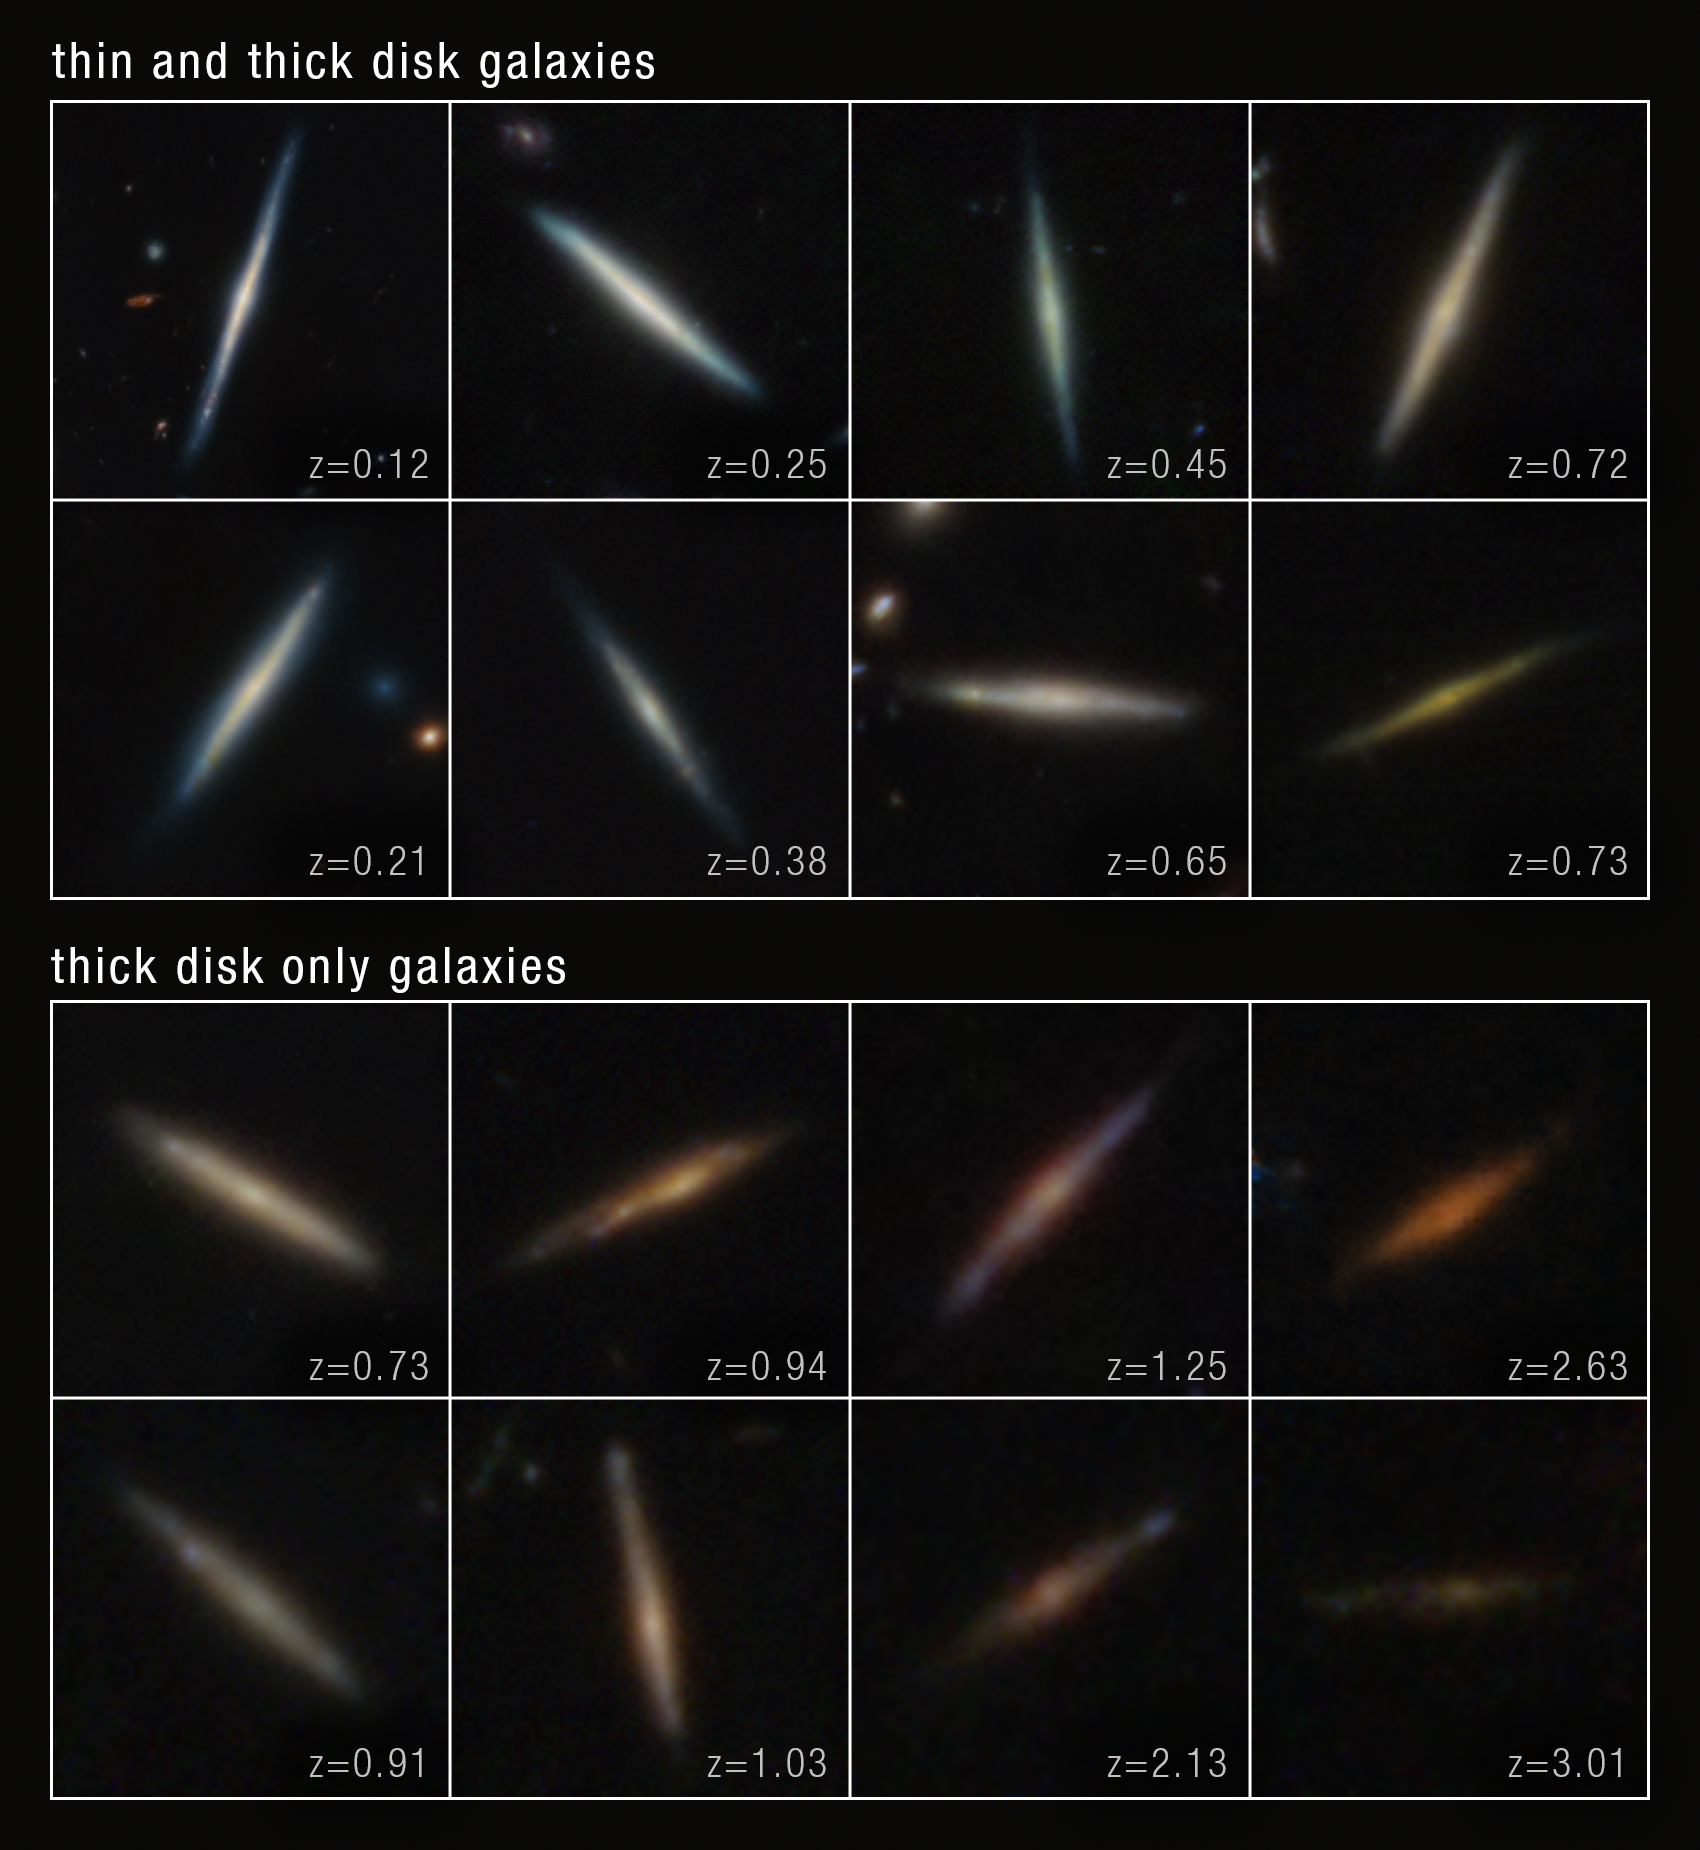

Disc galaxies: thick and thin

Present-day disc galaxies often contain a thick, star-filled outer disc and an embedded thin disc of stars. Three major theoretical scenarios have been proposed by astronomers to explain how this dual-disc structure comes to be. Using archival data from the NASA/ESA/CSA James Webb Space Telescope, a team of astronomers is closer to understanding disc galaxies’ origins, and the stellar thick- and thin-disc formation process. The team carefully identified, visually verified, and analysed a statistical sample of more than 100 edge-on disc galaxies at various periods — up to 11 billion years ago (or approximately 2.8 billion years after the Big Bang). The results of their analysis suggest that galaxies form a thick disc first, followed by a thin disc. The timing of this process depends on a galaxy’s mass: high-mass, single-disc galaxies transitioned to two-disc structures around 8 billion years ago, while low-mass, single-disc galaxies formed their thin discs about 4 billion years ago.

This image was created with Webb data from proposals: 1180 (D. Eisenstein), 1895 (P. Oesch), 2079 (S. Finkelstein), 1181 (Eisenstein), 2514 (C. Williams), 3577 (E. Egami), 1345 (S. Finkelstein), and 1837 (J. Dunlop).

Credit: NASA, ESA, CSA, STScI, T. Tsukui (ANU)